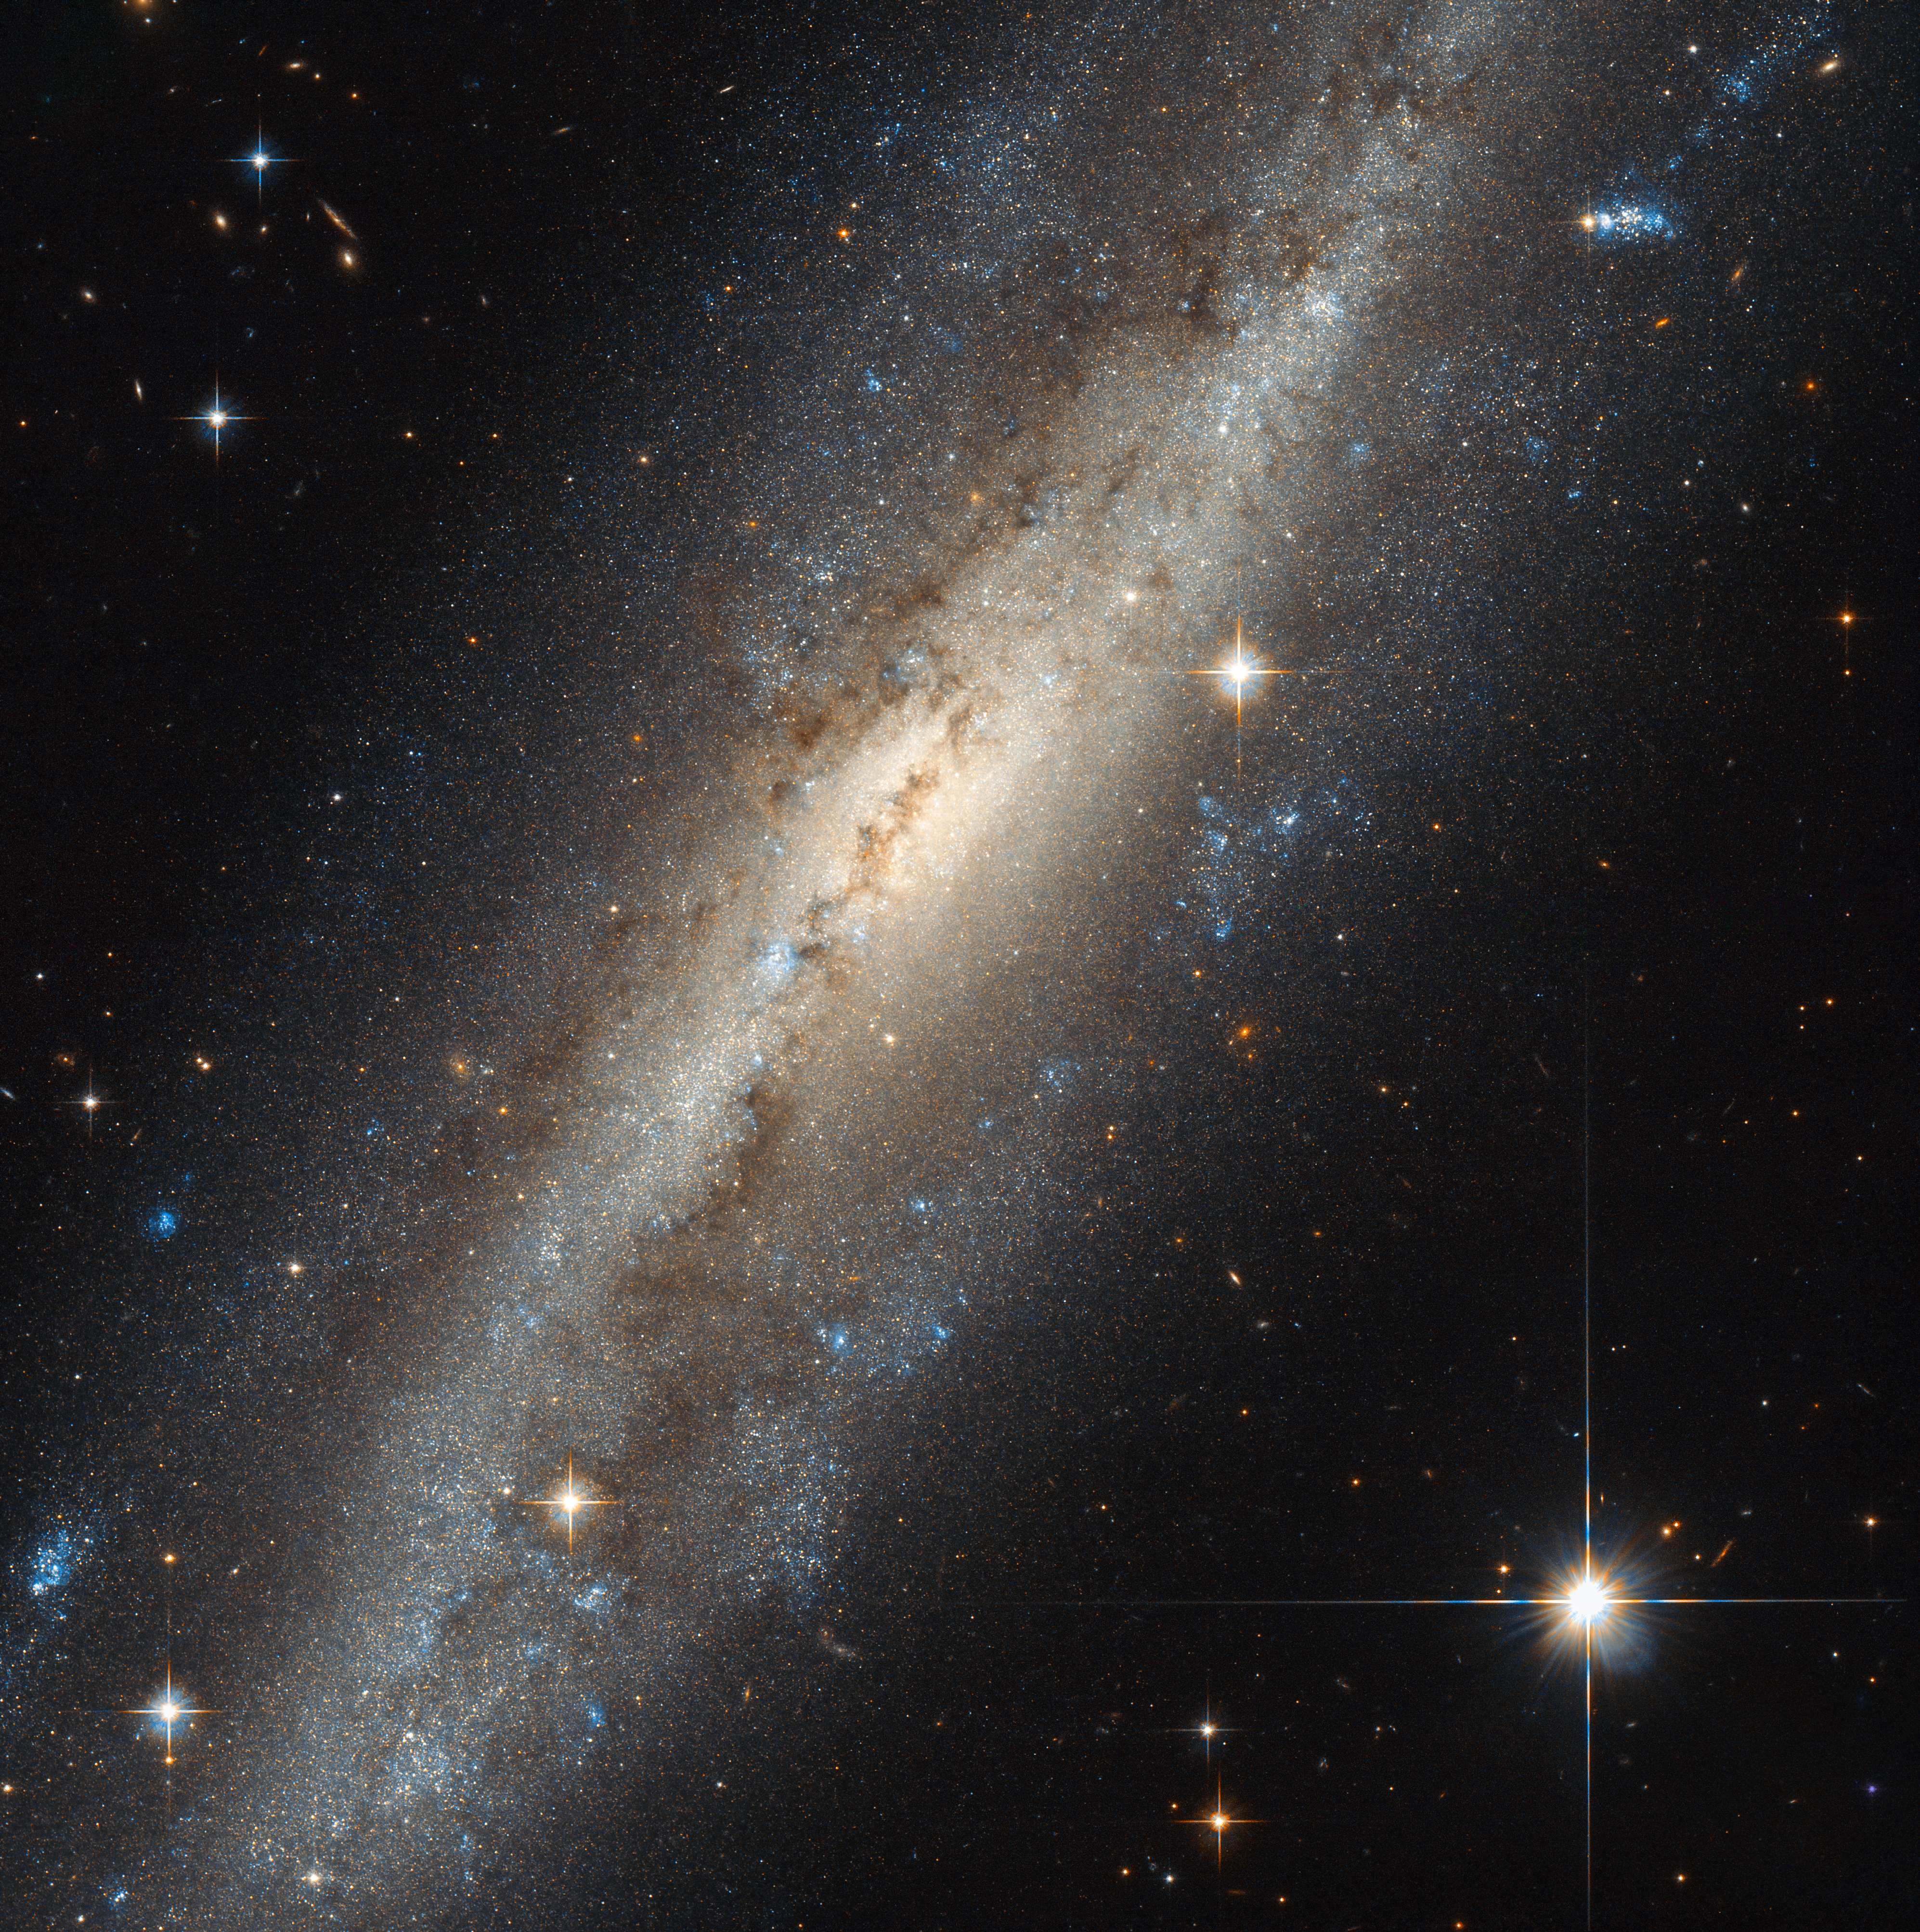

A spiral in Andromeda

Not to be confused with our neighbouring Andromeda Galaxy, the Andromeda constellation is one of the 88 modern constellations. More importantly for this image, it is home to the pictured NGC 7640.

Many different classifications are used to identify galaxies by shape and structure — NGC 7640 is a barred spiral type. These are recognisable by their spiral arms, which fan out not from a circular core, but from an elongated bar cutting through the galaxy’s centre. Our home galaxy, the Milky Way, is also a barred spiral galaxy. NGC 7640 might not look much like a spiral in this image, but this is due to the orientation of the galaxy with respect to Earth — or to Hubble, which acted as photographer in this case! We often do not see galaxies face on, which can make features such as spiral arms less obvious.

There is evidence that NGC 7640 has experienced some kind of interaction in its past. Galaxies contain vast amounts of mass, and therefore affect one another via gravity. Sometimes these interactions can be mild, and sometimes hugely dramatic, with two or more colliding and merging into a new, bigger galaxy. Understanding the history of a galaxy, and what interactions it has experienced, helps astronomers to improve their understanding of how galaxies — and the stars within them — form.

Credit: ESA/Hubble & NASA